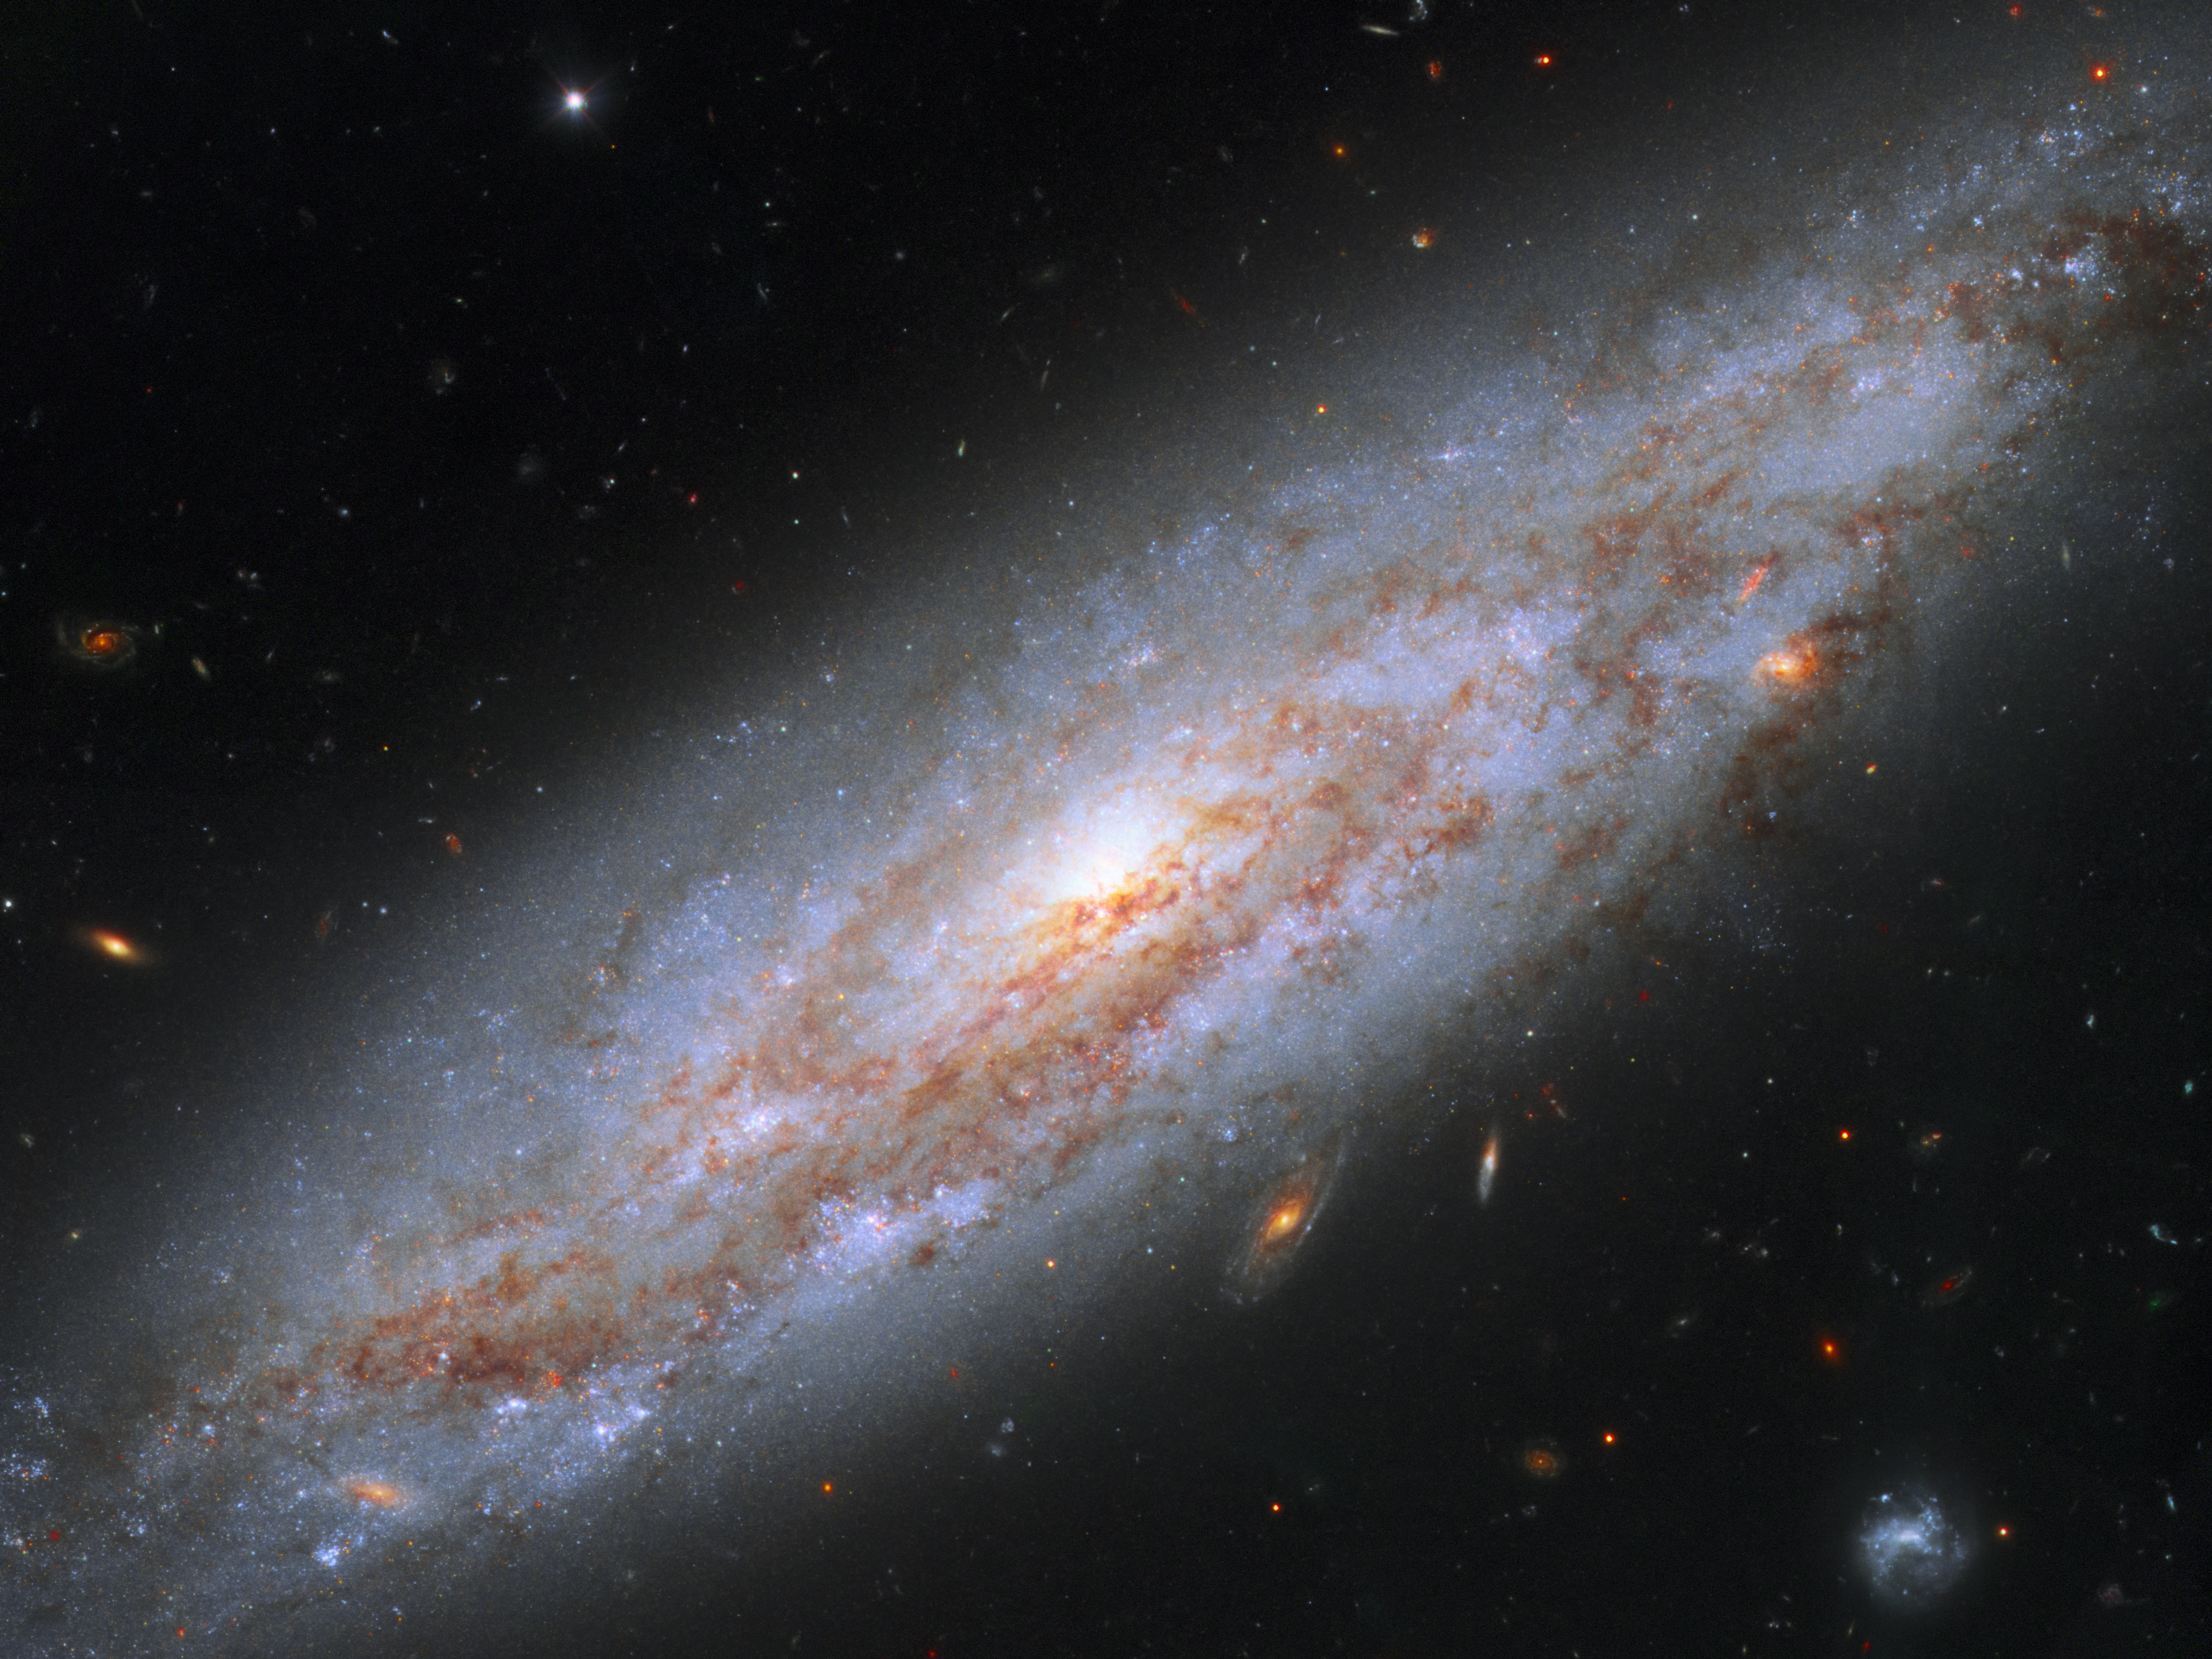

Galaxy full of cosmic lighthouses

This enchanting spiral galaxy can be found in the constellation of Ursa Major (the Great Bear). Star-studded NGC 3972 lies about 65 million light-years away from the Earth, meaning that the light that we see now left it 65 million years ago, just when the dinosaurs became extinct.

NGC 3972 has had its fair share of dramatic events. In 2011 astronomers observed the explosion of a type Ia supernova in the galaxy (not visible in this image). These dazzling objects all peak at the same brightness, and are brilliant enough to be seen over large distances. NGC 3972 also contains many pulsating stars called Cepheid variables. These stars change their brightness at a rate matched closely to their intrinsic luminosity, making them ideal cosmic lighthouses for measuring accurate distances to relatively nearby galaxies.

Astronomers search for Cepheid variables in nearby galaxies which also contain a type Ia supernova so they can compare the true brightness of both types of stars. That brightness information is used to calibrate the luminosity of Type Ia supernovae in far-flung galaxies so that astronomers can calculate the galaxies' distances from Earth. Once astronomers know accurate distances to galaxies near and far, they can determine and refine the expansion rate of the Universe.

This image was taken in 2015 with Hubble’s Wide Field Camera 3, as part of a project to improve the precision of the Hubble constant — a figure that describes the expansion rate of the Universe.

Credit: NASA, ESA, A. Riess (STScI/JHU)